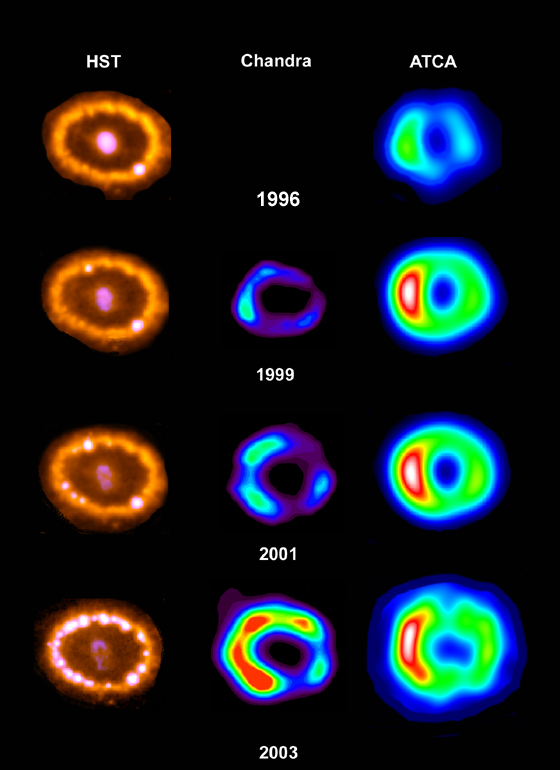

Observations of SN1987A at different wavelengths

Hubble's optical light observations of Supernova 1987A become even more valuable when they are combined with observations from telescopes that can measure other kinds of radiation from the exploding star. The image shows the evolving images of hot spots from the Hubble Telescope alongside images taken at approximately the same time from the Chandra X-ray Observatory and the Australia Telescope Compact Array (ATCA) radio observatory. The X-ray images show an expanding ring of gas, hotter than a million degrees, that has evidently reached the optical ring at the same time as the hot spots appeared. The radio images show a similar expanding ring of radio emission, caused by electrons moving through magnetized matter at nearly the speed of light.

Credit: R. McCray (University of Colorado), D. Burrows and S. Park (Pennsylvania State University), and R. Manchester (Australia Telescope National Facility)